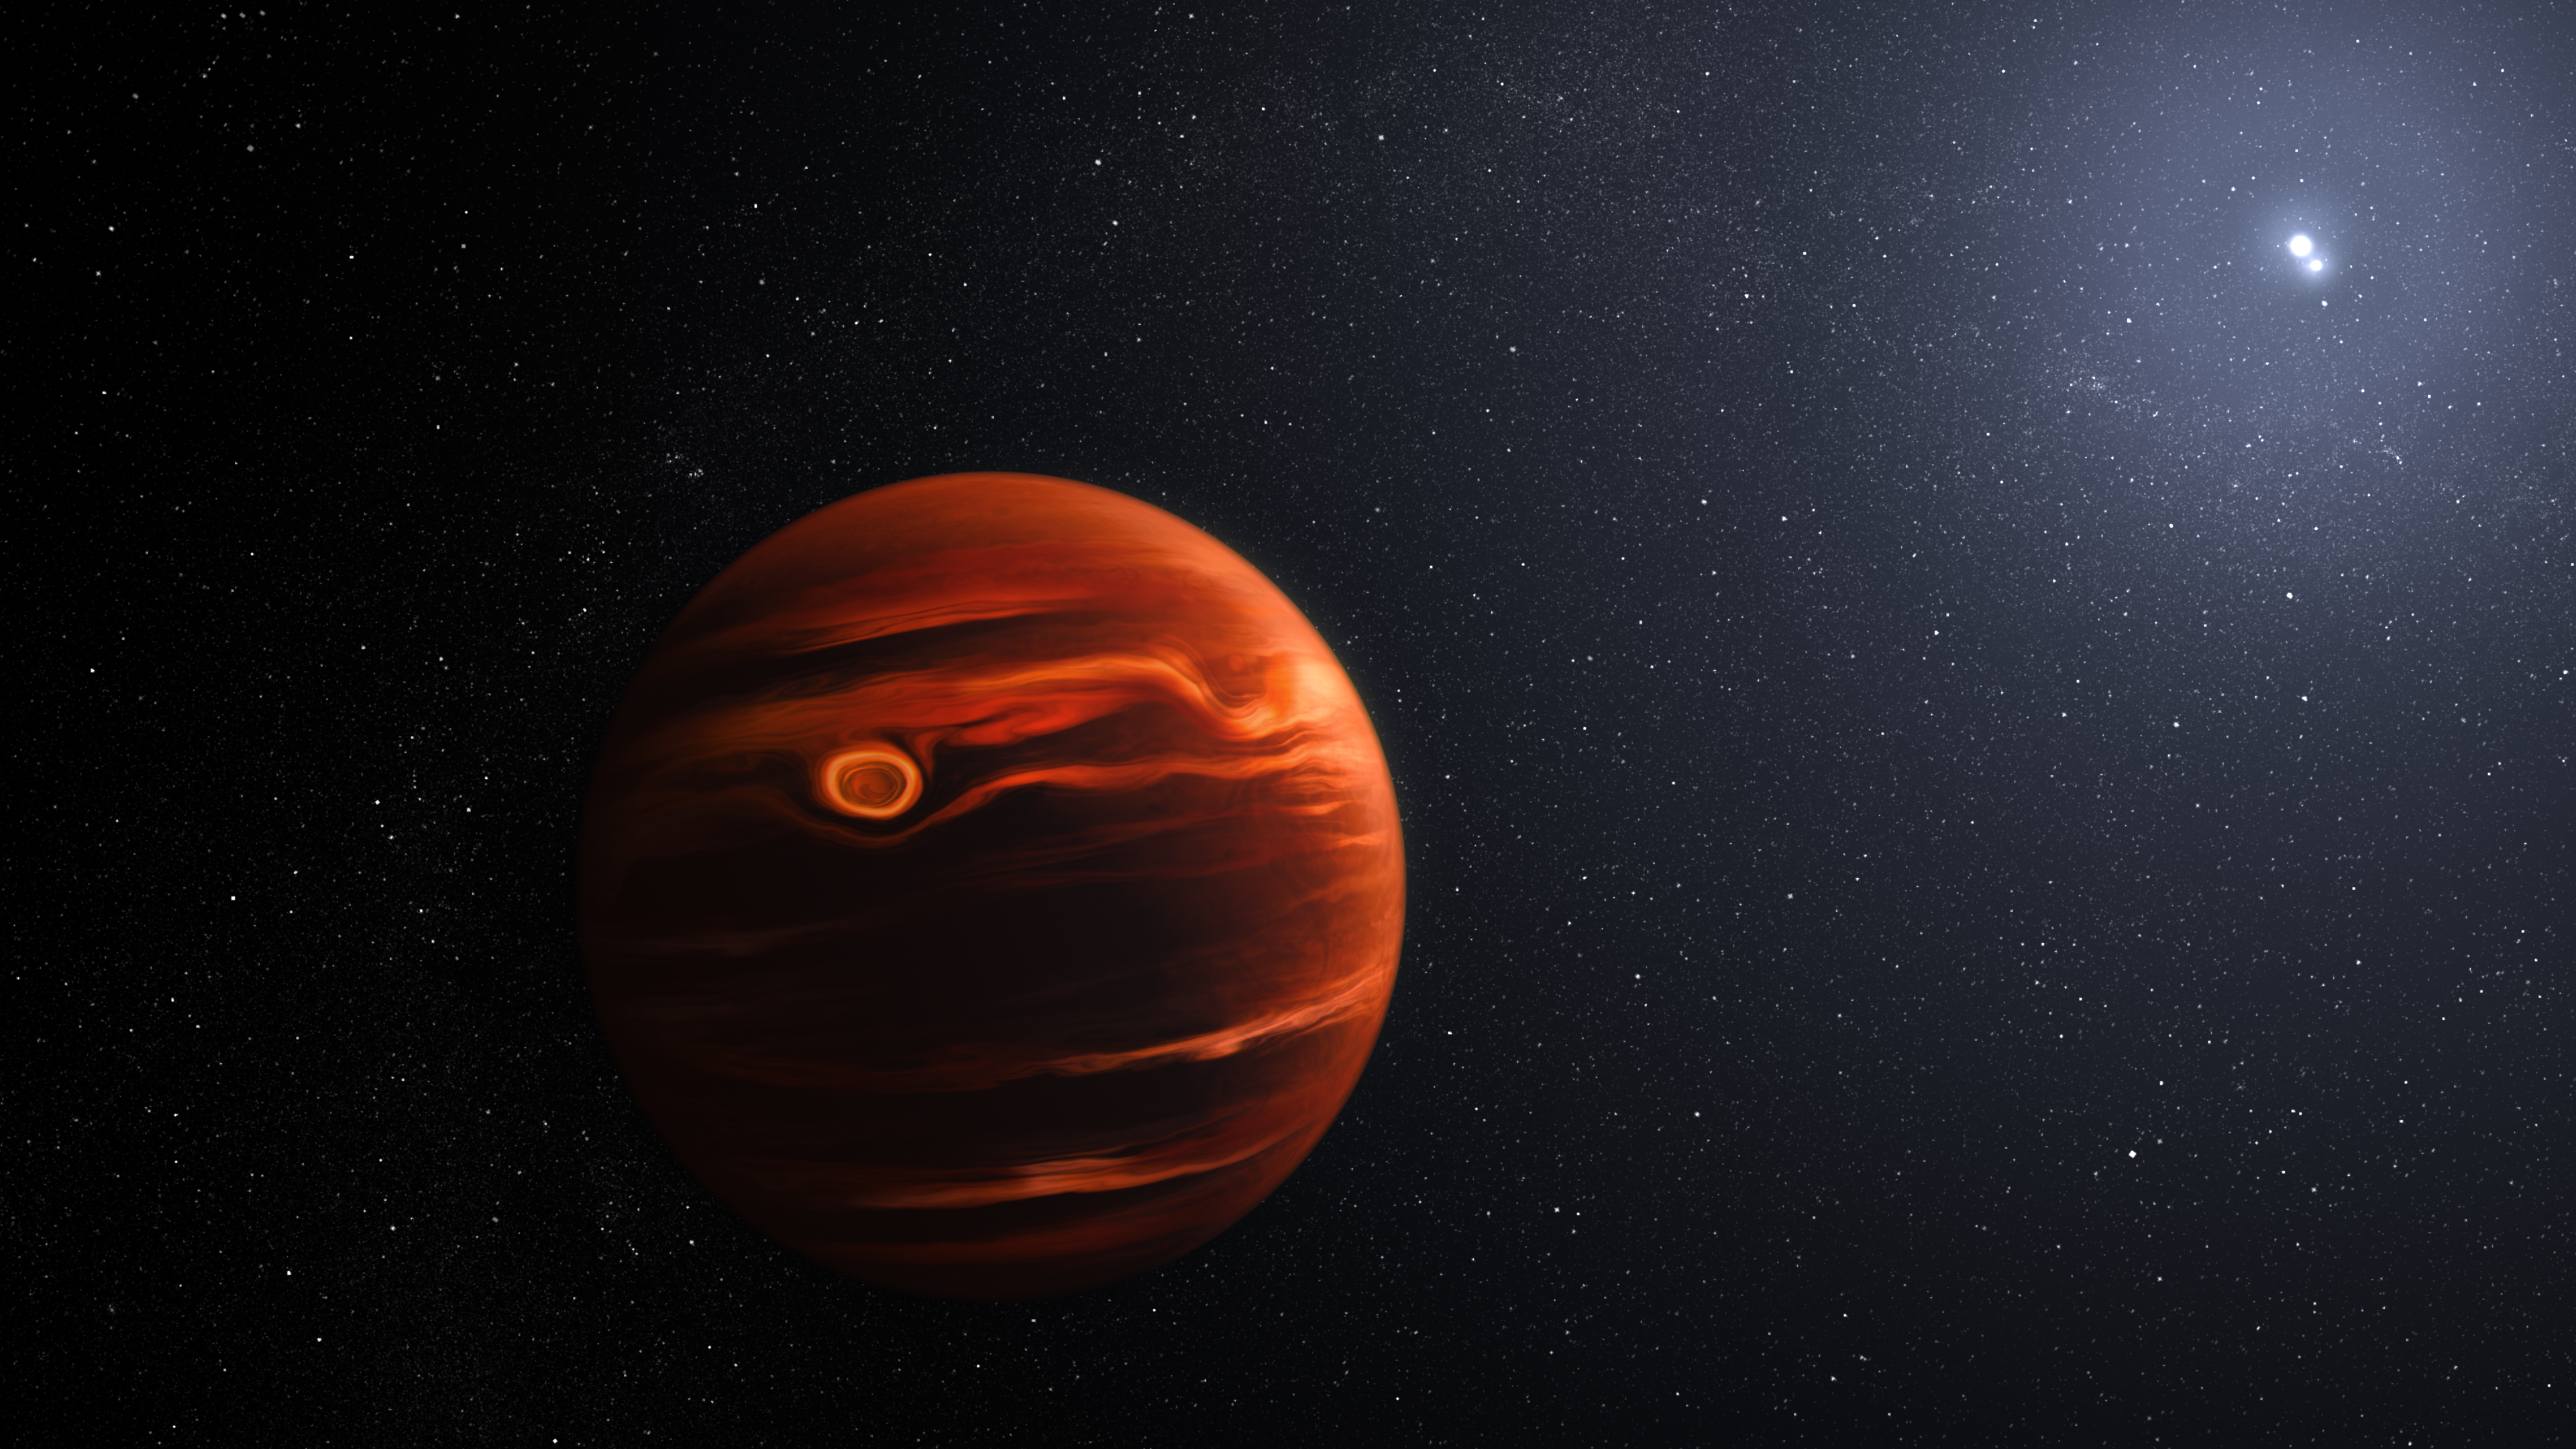

Exoplanet VHS 1256 b and its stars (illustration)

This illustration conceptualises the swirling clouds identified by the James Webb Space Telescope in the atmosphere of the exoplanet VHS 1256 b. The planet is about 40 light-years away and orbits two stars that are locked in their own tight rotation. Its clouds, which are filled with silicate dust, are constantly rising, mixing, and moving during its 22-hour day.

Credit: NASA, ESA, CSA, J. Olmsted (STScI)